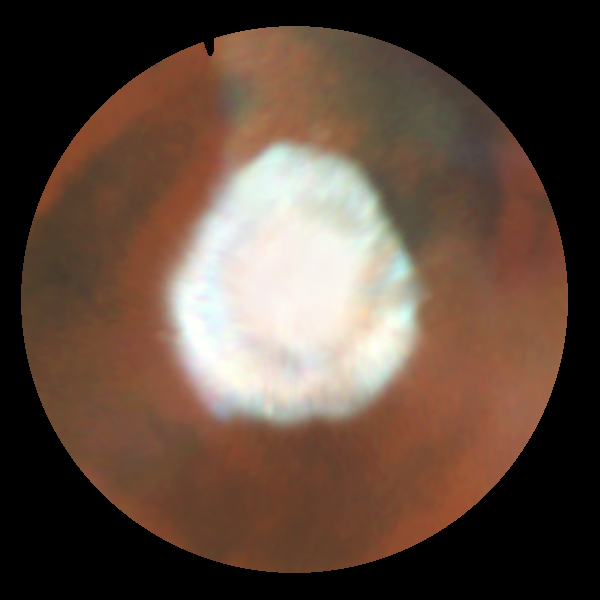

Seasonal Changes in Mars North Polar Ice Cap

Increased warming as spring progresses in the northern hemisphere has sublimated the carbon dioxide ice and frost below 70 degrees north latitude. The faint darker circle inside the cap boundary marks the location of circumpolar sand dunes (see March '97 map); these dark dunes are warmed more by solar heating than are the brighter surroundings, so the surface frost sublimates from the dunes earlier than from the neighboring areas.

Particularly evident is the marked hexagonal shape of the polar cap at this season, noted previously by HST in 1995 and Mariner 9 in 1972; this may be due to topography, which isn't well known, or to wave structure in the circulation. This map was assembled from WFPC2 images obtained between Dec. 30, 1996 and Jan. 4, 1997.

Credit: Phil James (Univ. Toledo), Todd Clancy (Space Science Inst., Boulder, CO), Steve Lee (Univ. Colorado), and NASA/ESA